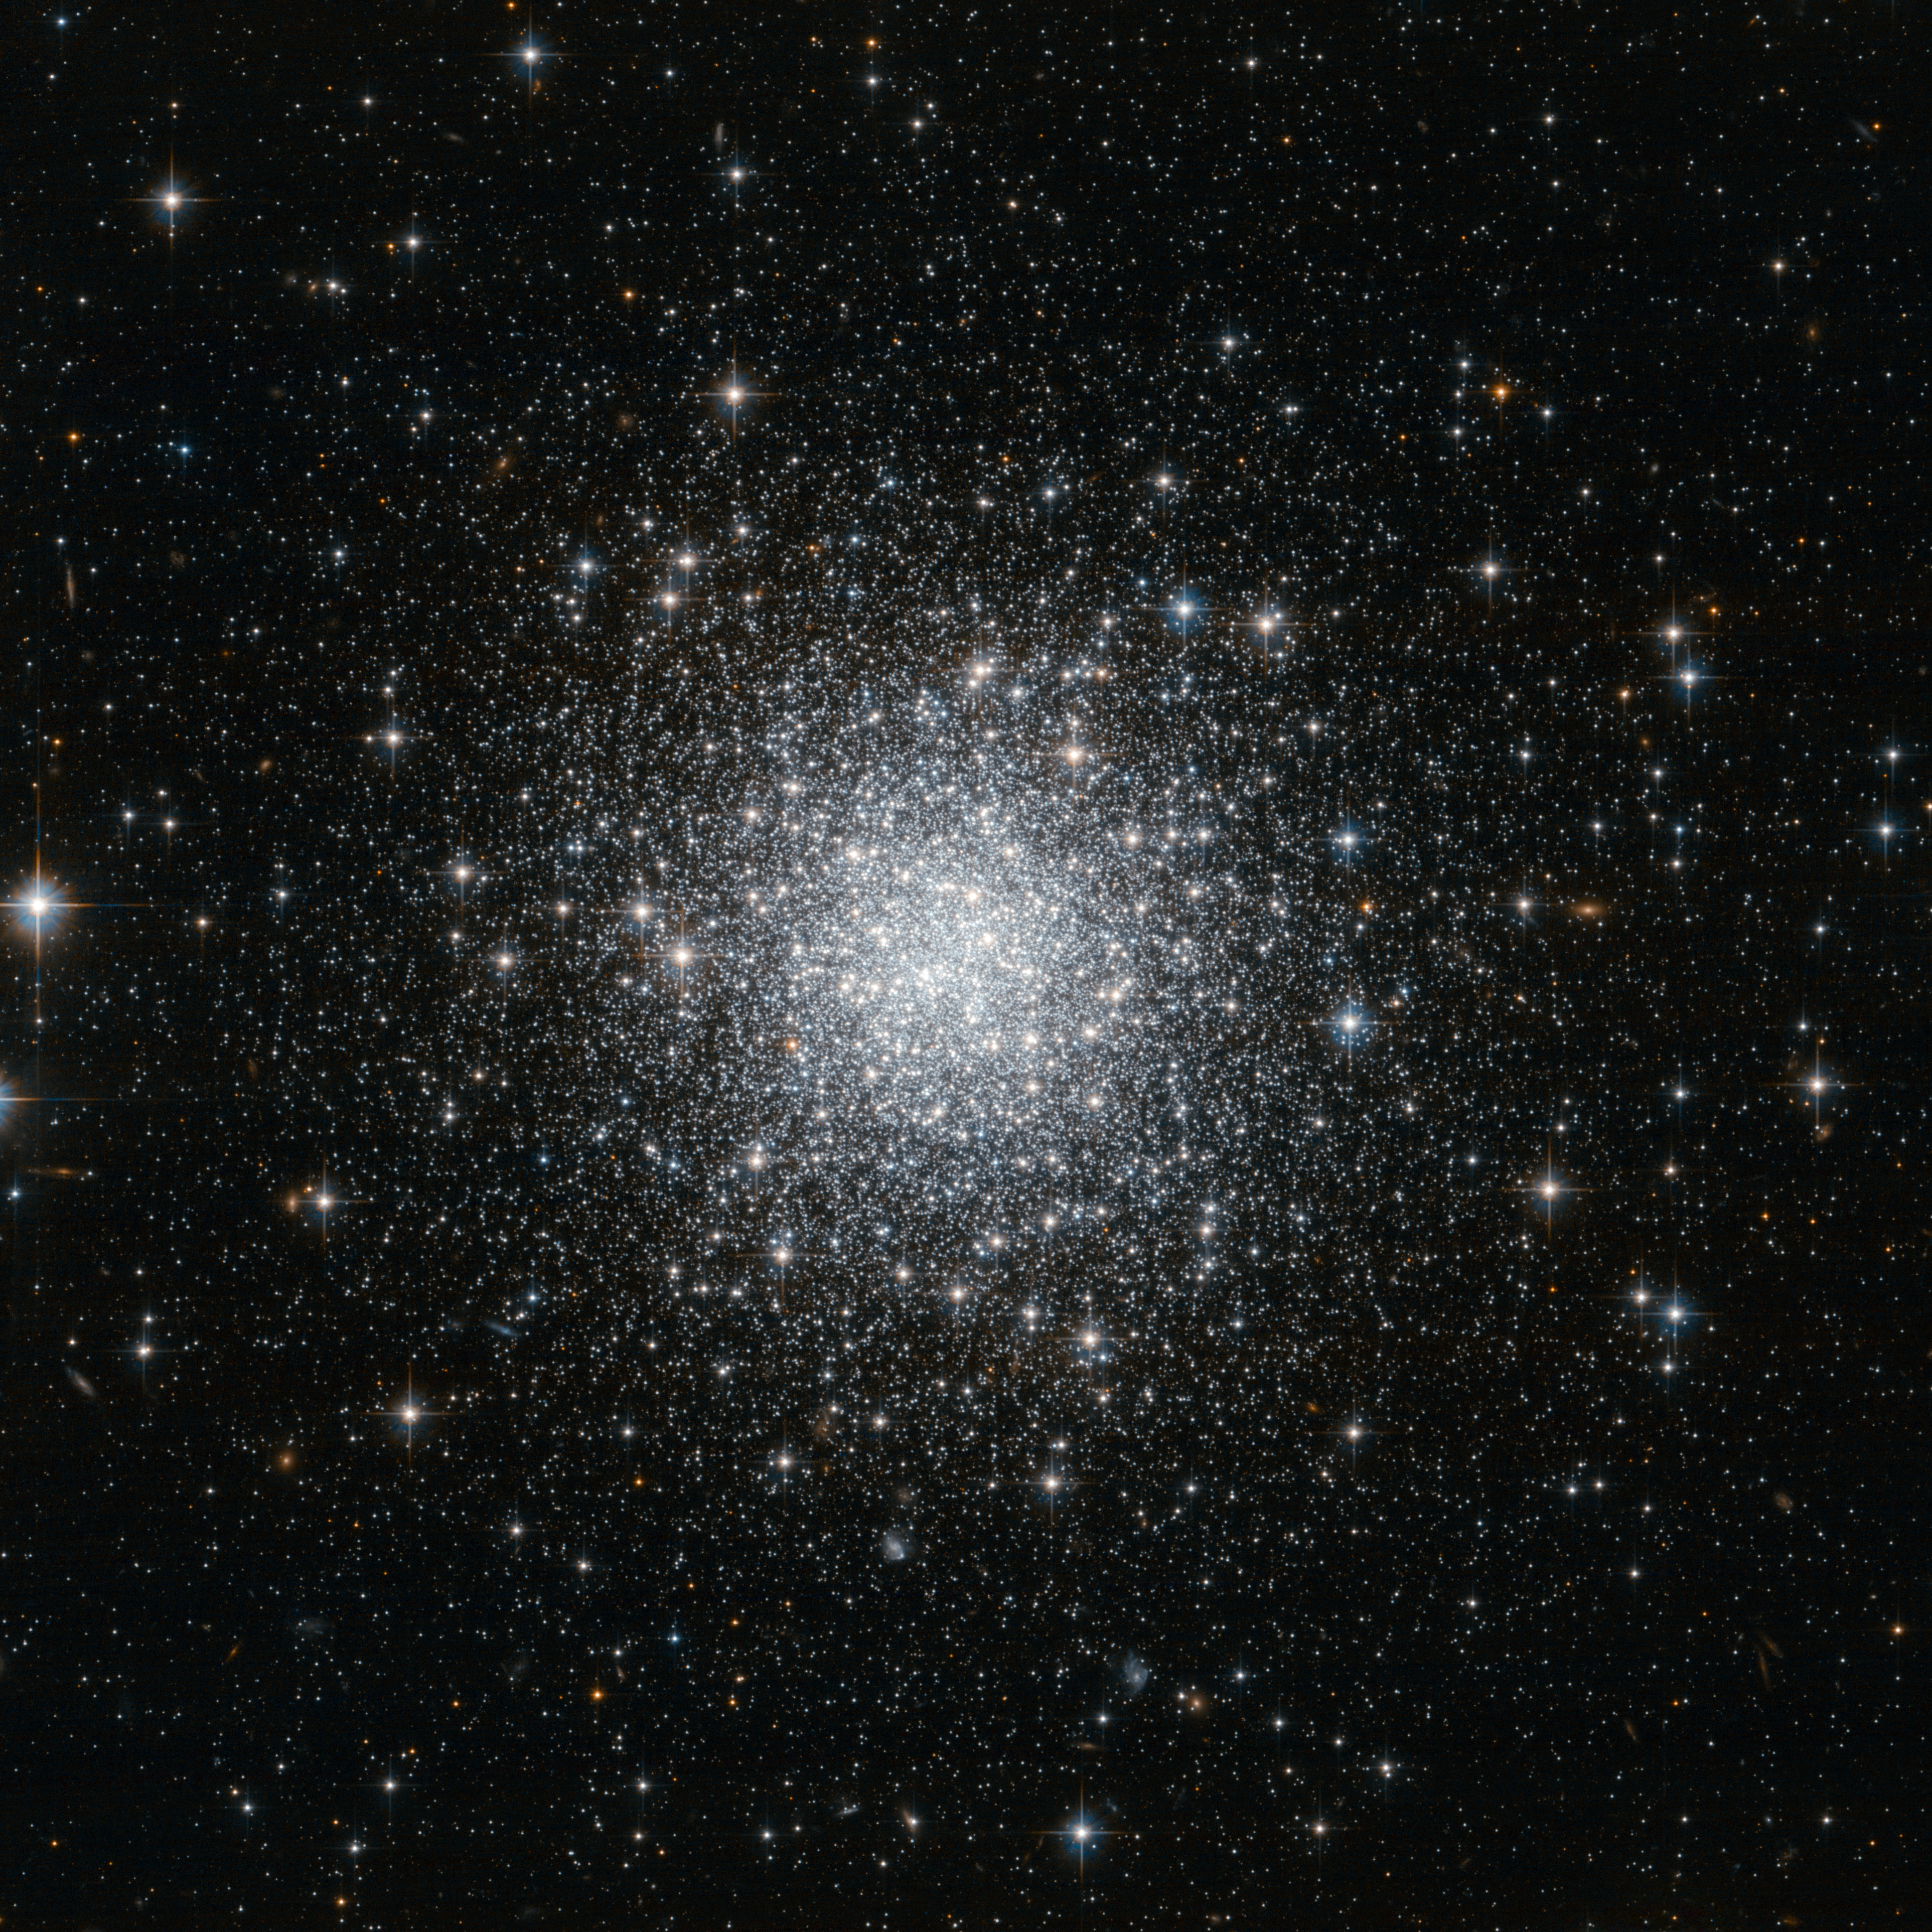

A remote outpost of the Milky Way

This NASA/ESA Hubble Space Telescope image shows a compact and distant globular star cluster that lies in one of the smallest constellations in the night sky, Delphinus (The Dolphin). Due to its modest size, great distance and relatively low brightness, NGC 7006 is often ignored by amateur astronomers. But even remote globular clusters such as this one appear bright and clear when imaged by Hubble’s Advanced Camera for Surveys.

NGC 7006 resides in the outskirts of the Milky Way. It is about 135 000 light-years away, five times the distance between the Sun and the centre of the galaxy, and it is part of the galactic halo. This roughly spherical region of the Milky Way is made up of dark matter, gas and sparsely distributed stellar clusters.

Like other remote globular clusters, NGC 7006 provides important clues that help astronomers to understand how stars formed and assembled in the halo. The cluster now pictured by Hubble has a very eccentric orbit indicating that it may have formed independently, in a small galaxy outside our own that was then captured by the Milky Way.

Although NGC 7006 is very distant for a Milky Way globular cluster, it is much closer than the many faint galaxies that can be seen in the background of this image. Each of these faint smudges is probably accompanied by many globular clusters similar to NGC 7006 that are too faint to be seen even by Hubble.

This image was taken using the Wide Field Channel of the Advanced Camera for Surveys, in a combination of visible and near-infrared light. The field of view is a little over 3 by 3 arcminutes.

Credit: ESA/Hubble & NASA